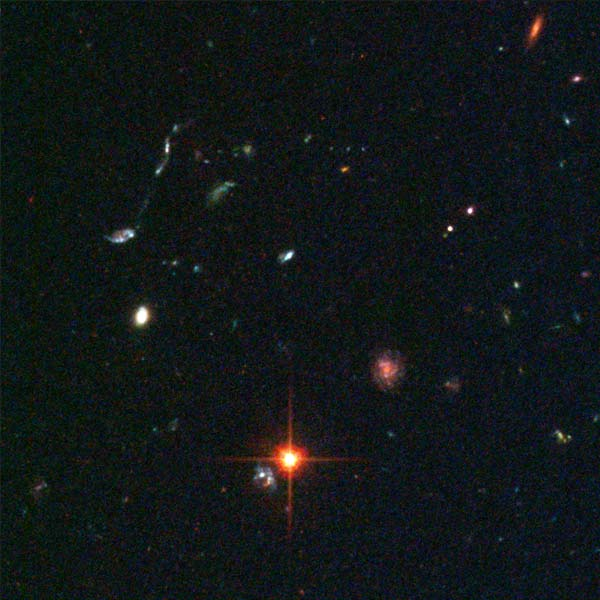

Details from ACS Image of NGC 3370: Lower Middle Right

In the lower middle right, a distant filament of merging blue galaxies can be seen.

Credit: NASA & ESA